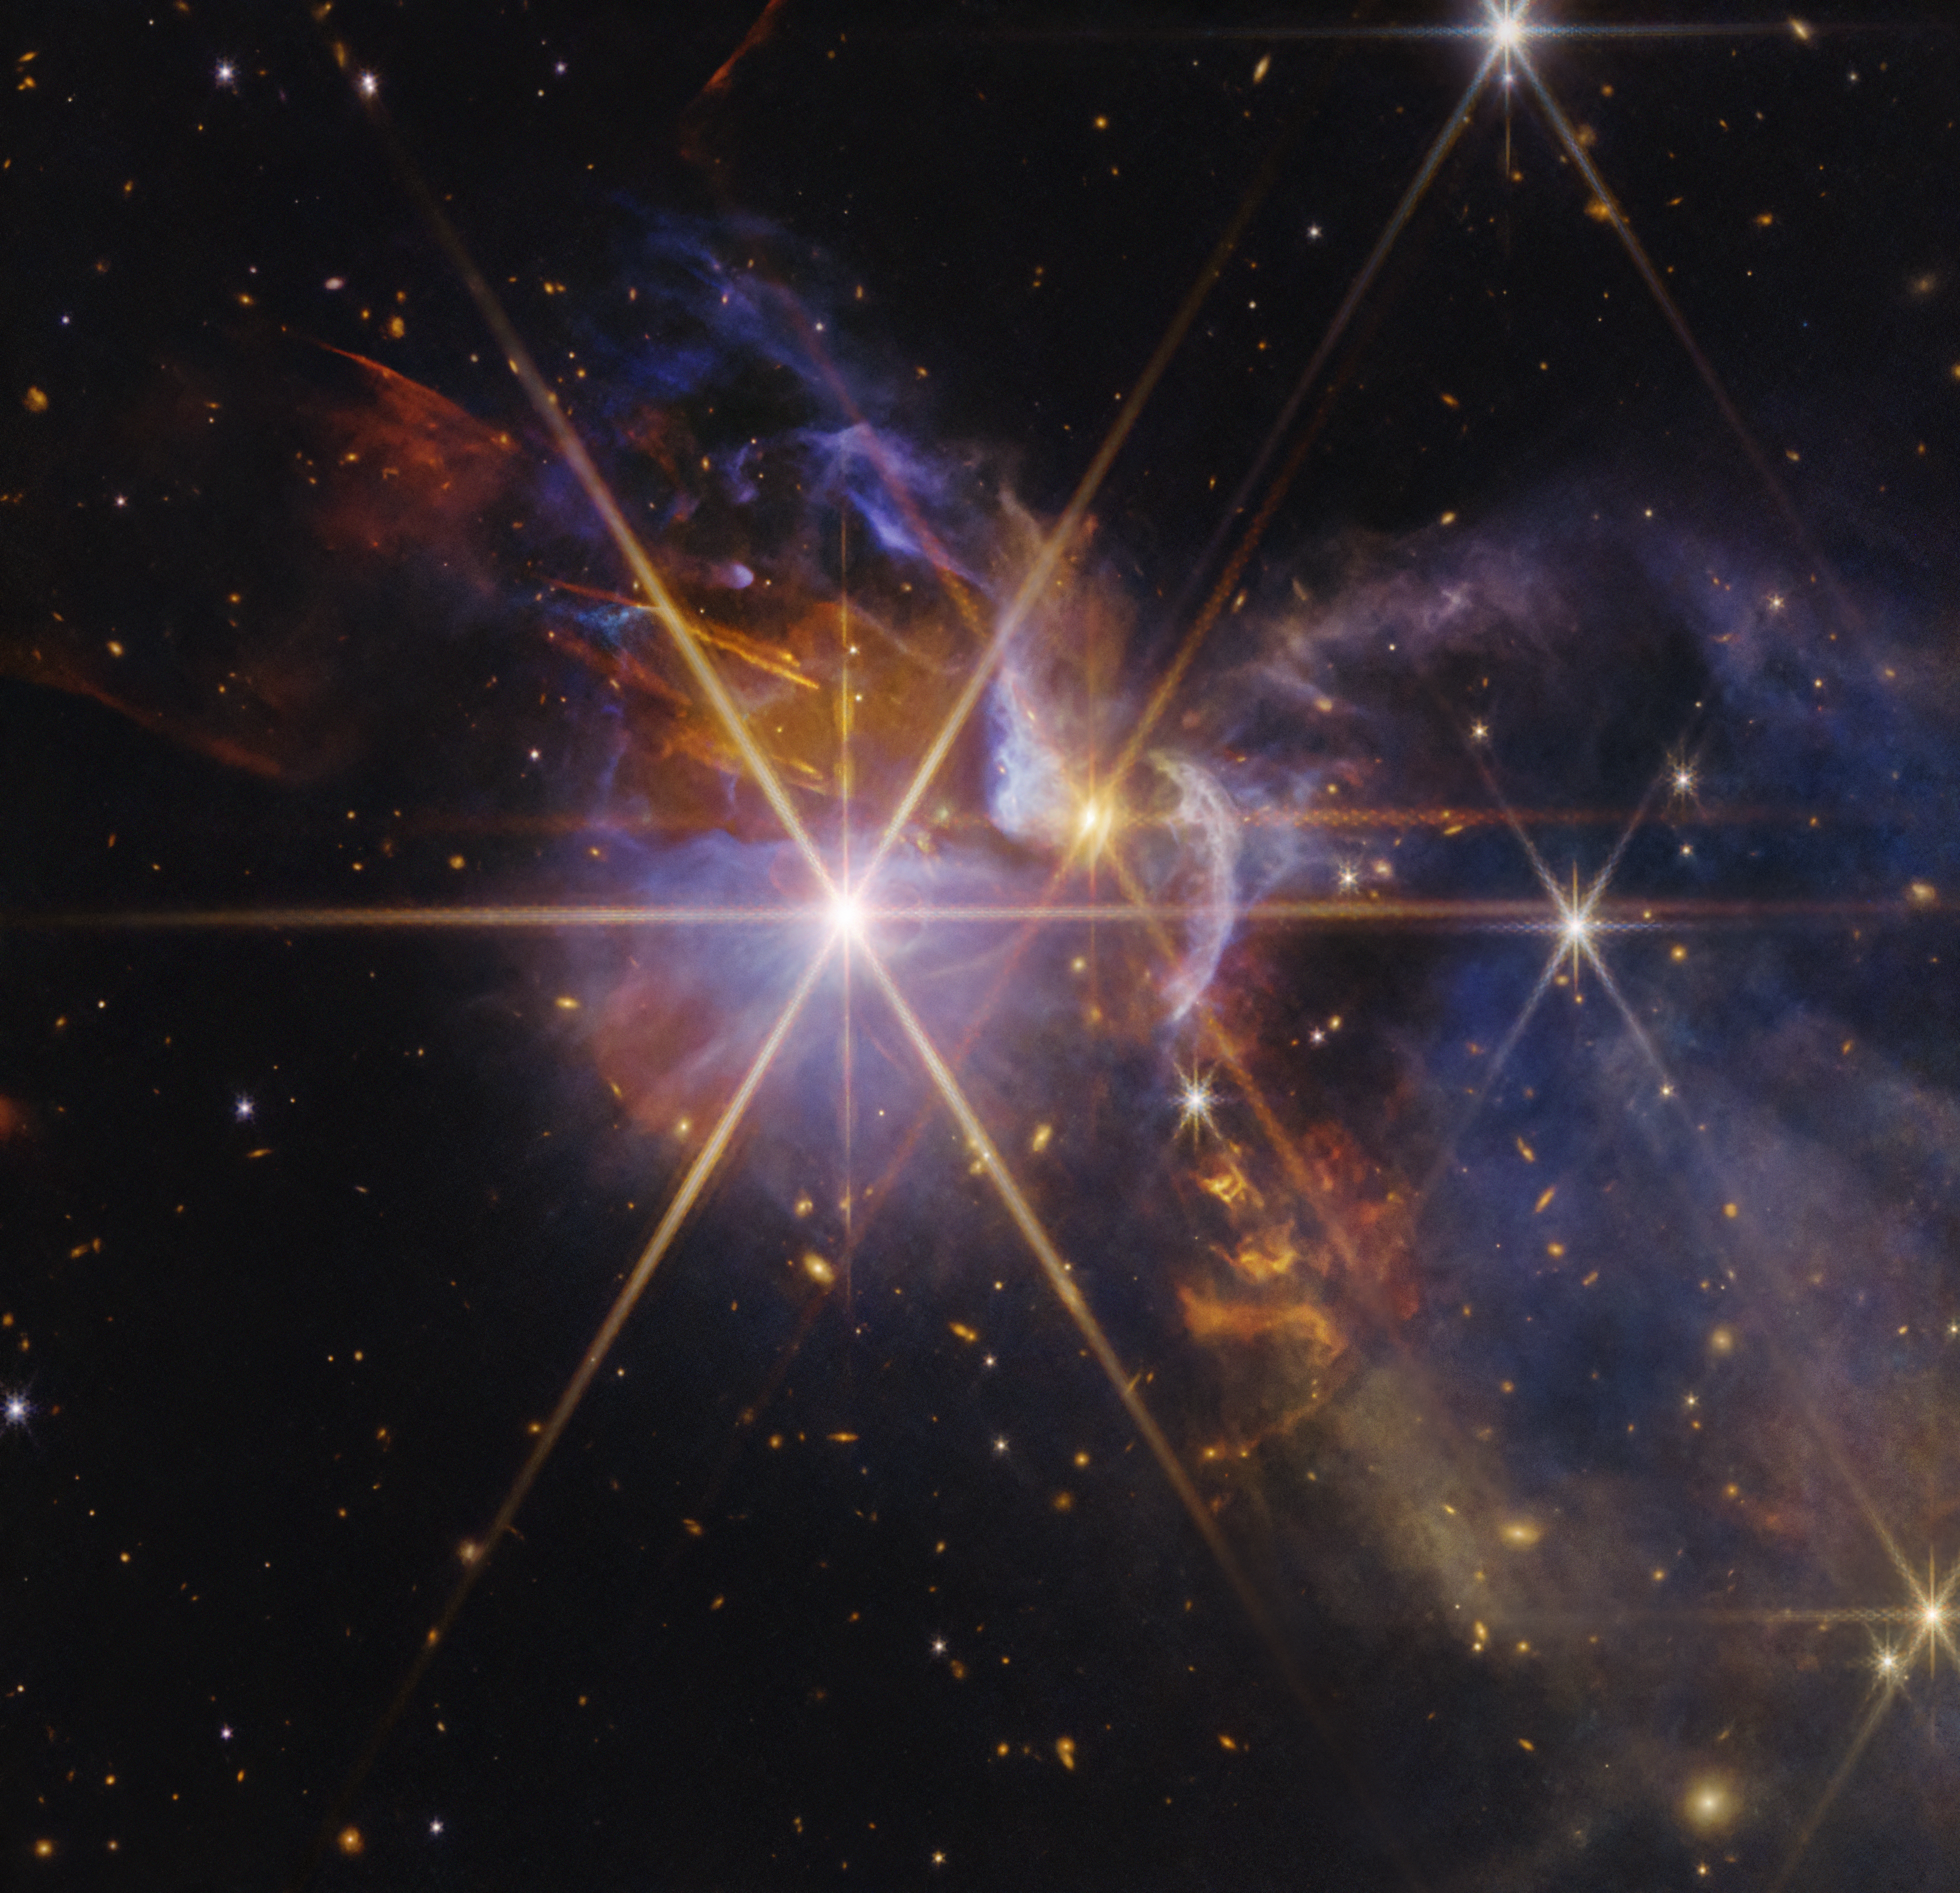

FS Tau (Webb NIRCam image)

The NASA/ESA/CSA James Webb Space Telescope captures the infrared light from bright protostars in the young star system FS Tau.

In addition to myriad background galaxies that burst into view, this image flickers with a number of protostars, or baby stars that are formed from dense pockets of gas and dust. These hot, clumpy, and low-mass objects eventually will become full-fledged stars capable of burning hydrogen in their cores, like our Sun. The protostars of FS Tau are about 1 to 3 million years old, which is relatively young in cosmic scales. Our Sun, by contrast, is 4.6 billion years old.

FS Tau A, a pair of protostars that creates the largest diffraction pattern slightly to the left of centre, is about half the mass of our Sun. FS Tau B, the orange protostar slightly right of centre, is thought to be responsible for the red (molecular hydrogen) and orange (soot-like molecules known as polycyclic aromatic hydrocarbons) outflows that we see amid the dusty region. The blue ridges are areas where light has been scattered by dust.

The different colours of the background galaxies indicate how much dust is in front of them, as dust both absorbs and scatters light. Redder galaxies lie behind larger amounts of dust, yellower galaxies lie behind thinner layers of dust, and whiter galaxies are mostly unobstructed.

You can learn more about this image here.

Credit: NASA, ESA, CSA, STScI. Image Processing: A. Pagan (STScI)